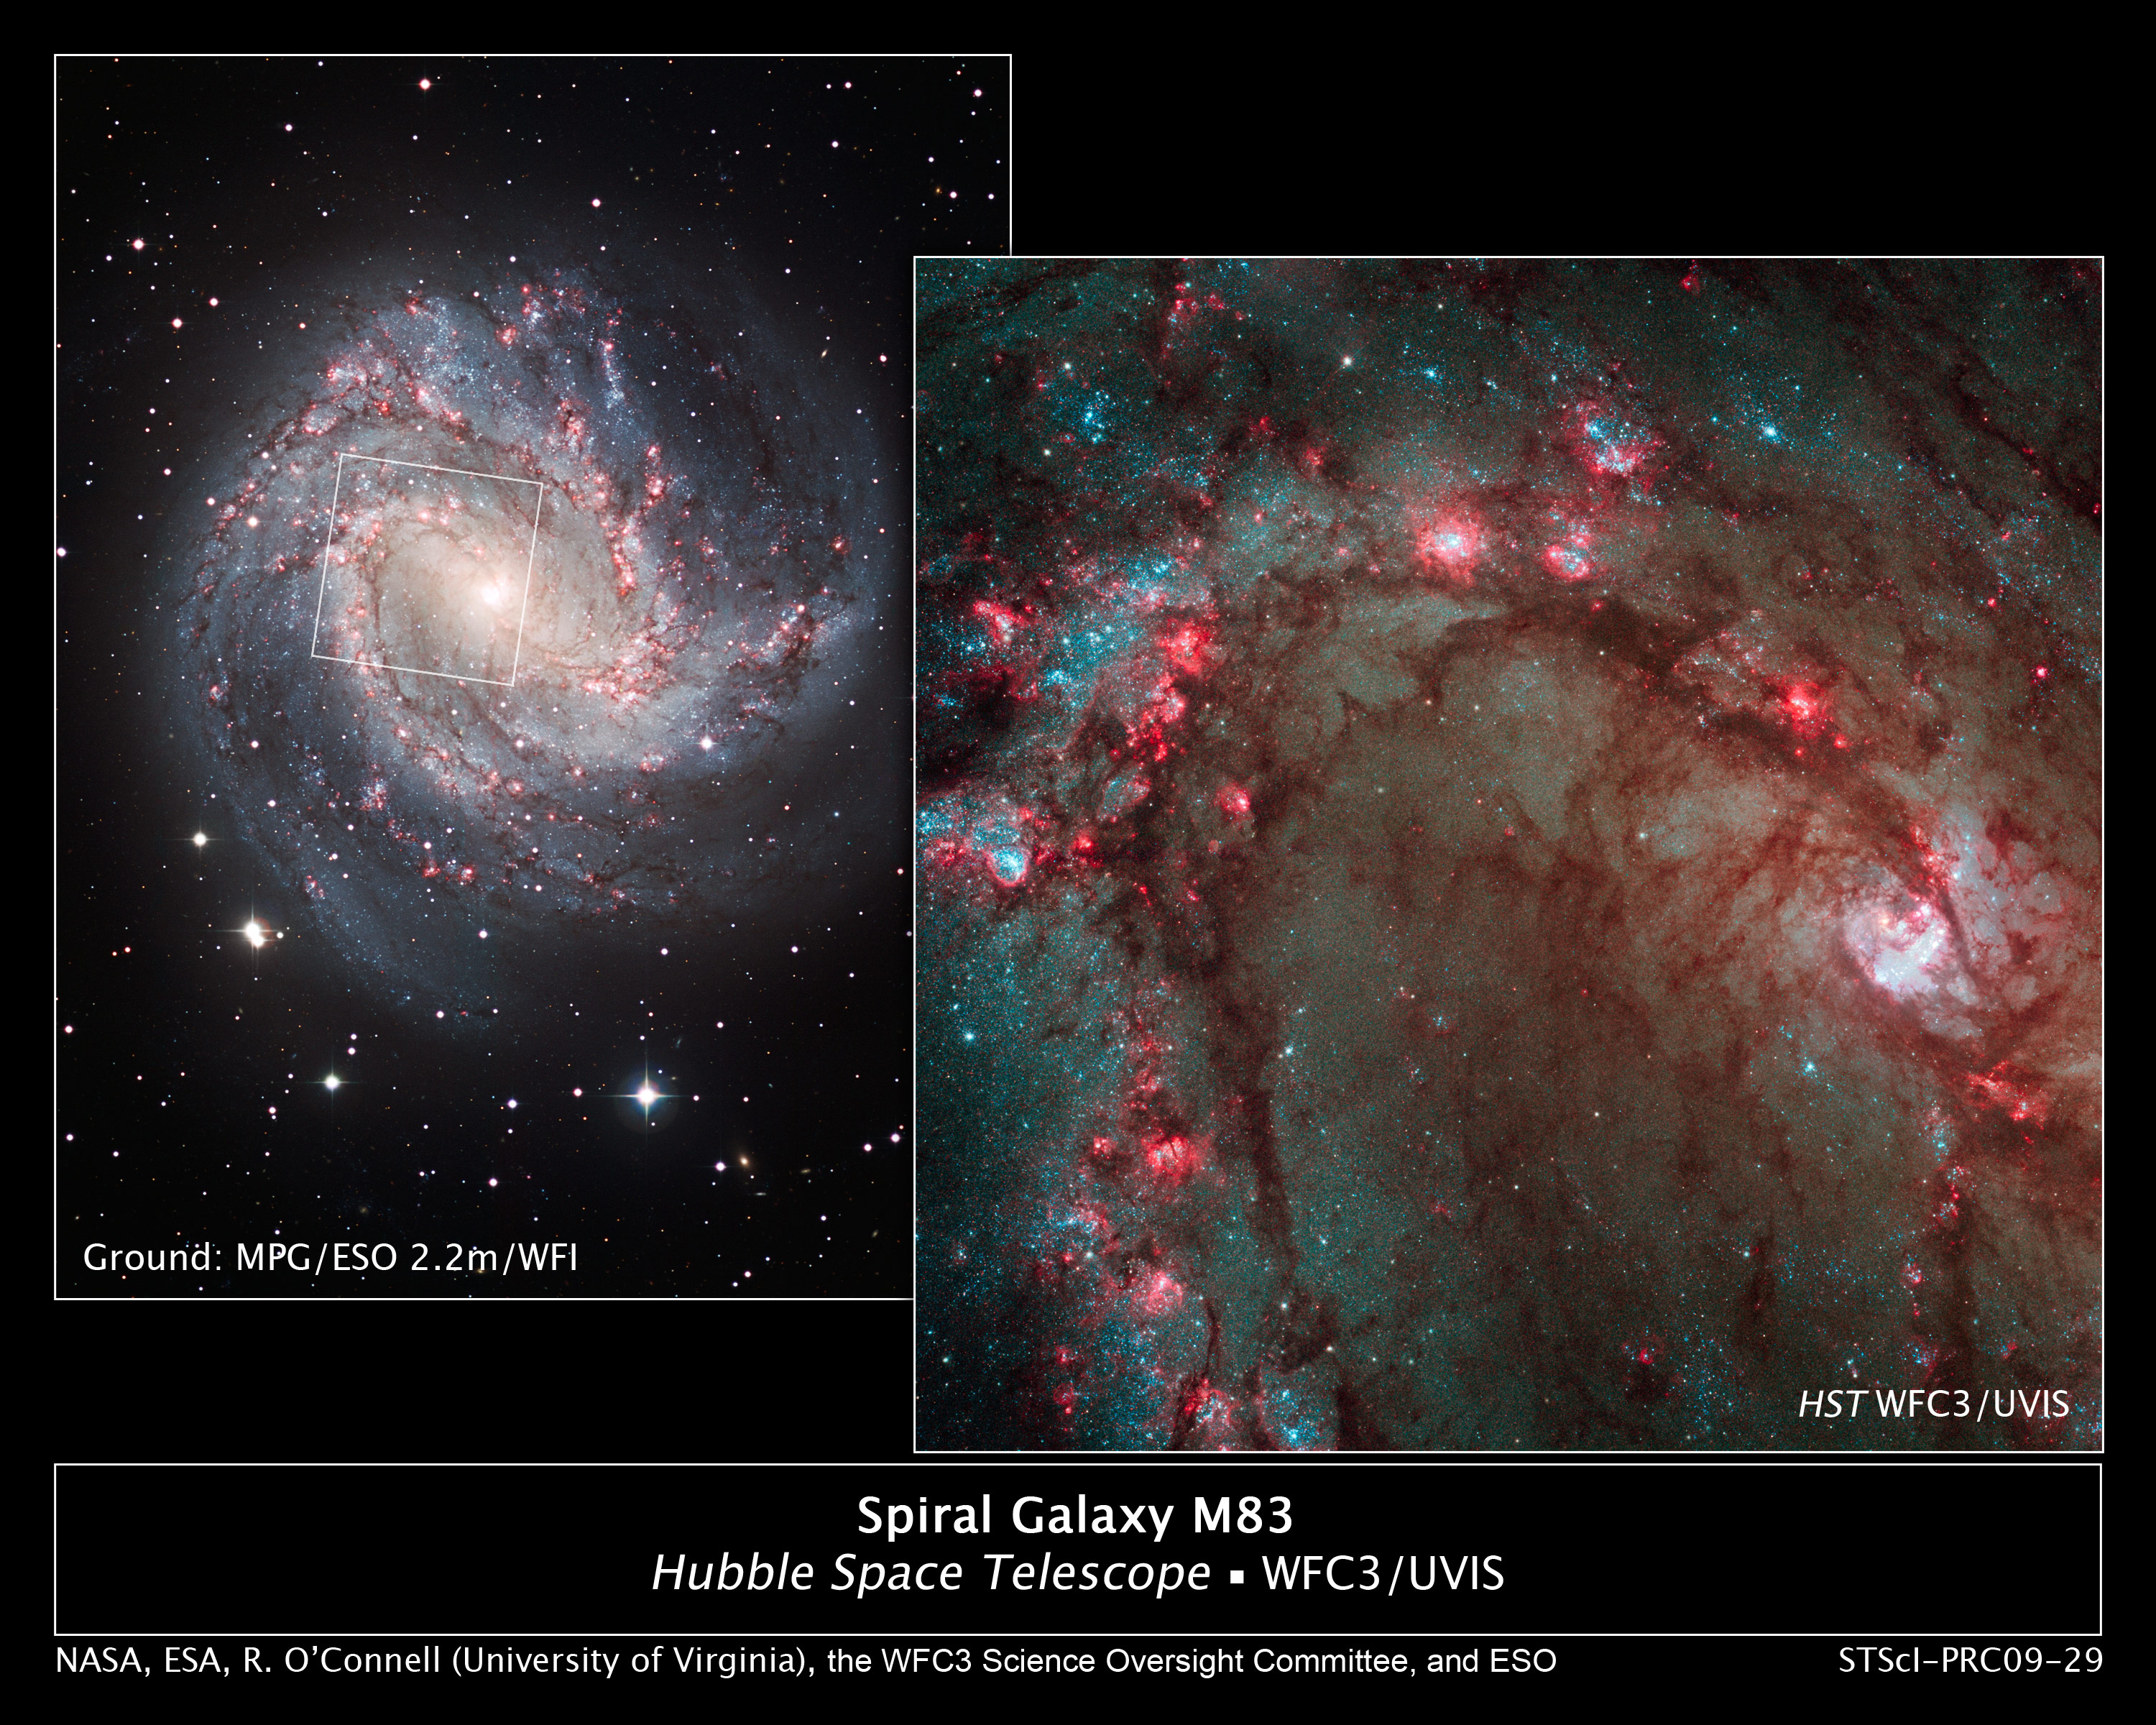

Hubble Image Showcases Star Birth in M83, the Southern Pinwheel

The spectacular new camera installed on the NASA/ESA Hubble Space Telescope during Servicing Mission 4 in May has delivered the most detailed view of star birth in the graceful, curving arms of the nearby spiral galaxy M83.

Nicknamed the Southern Pinwheel, M83 is undergoing more rapid star formation than our own Milky Way galaxy, especially in its nucleus. The sharp "eye" of the Wide Field Camera 3 (WFC3) has captured hundreds of young star clusters, ancient swarms of globular star clusters, and hundreds of thousands of individual stars, mostly blue supergiants and red supergiants.

The image at right is Hubble's close-up view of the myriad stars near the galaxy's core, the bright whitish region at far right. An image of the entire galaxy, taken by the European Southern Observatory's Wide Field Imager on the ESO/MPG 2.2-meter telescope at La Silla, Chile, is shown at left. The white box outlines Hubble's view.

WFC3's broad wavelength range, from ultraviolet to near-infrared, reveals stars at different stages of evolution, allowing astronomers to dissect the galaxy's star-formation history.

The image reveals in unprecedented detail the current rapid rate of star birth in this famous "grand design" spiral galaxy. The newest generations of stars are forming largely in clusters on the edges of the dark dust lanes, the backbone of the spiral arms. These fledgling stars, only a few million years old, are bursting out of their dusty cocoons and producing bubbles of reddish glowing hydrogen gas.

The excavated regions give a colourful "Swiss cheese" appearance to the spiral arm. Gradually, the young stars' fierce winds (streams of charged particles) blow away the gas, revealing bright blue star clusters. These stars are about 1 million to 10 million years old. The older populations of stars are not as blue.

A bar of stars, gas, and dust slicing across the core of the galaxy may be instigating most of the star birth in the galaxy's core. The bar funnels material to the galaxy's centre, where the most active star formation is taking place. The brightest star clusters reside along an arc near the core.

The remains of about 60 supernova blasts, the deaths of massive stars, can be seen in the image, five times more than known previously in this region. WFC3 identified the remnants of exploded stars. By studying these remnants, astronomers can better understand the nature of the progenitor stars, which are responsible for the creation and dispersal of most of the galaxy's heavy elements.

M83, located in the Southern Hemisphere, is often compared to M51, dubbed the Whirlpool galaxy, in the Northern Hemisphere. Located 15 million light-years away in the constellation Hydra, M83 is two times closer to Earth than M51.

Credit: NASA, ESA, R. O'Connell(University of Virginia), B. Whitmore (Space Telescope Science Institute), M. Dopita (Australian National University) and the Wide Field Camera 3 Science Oversight Committee Credit for Ground-based Image: ESO